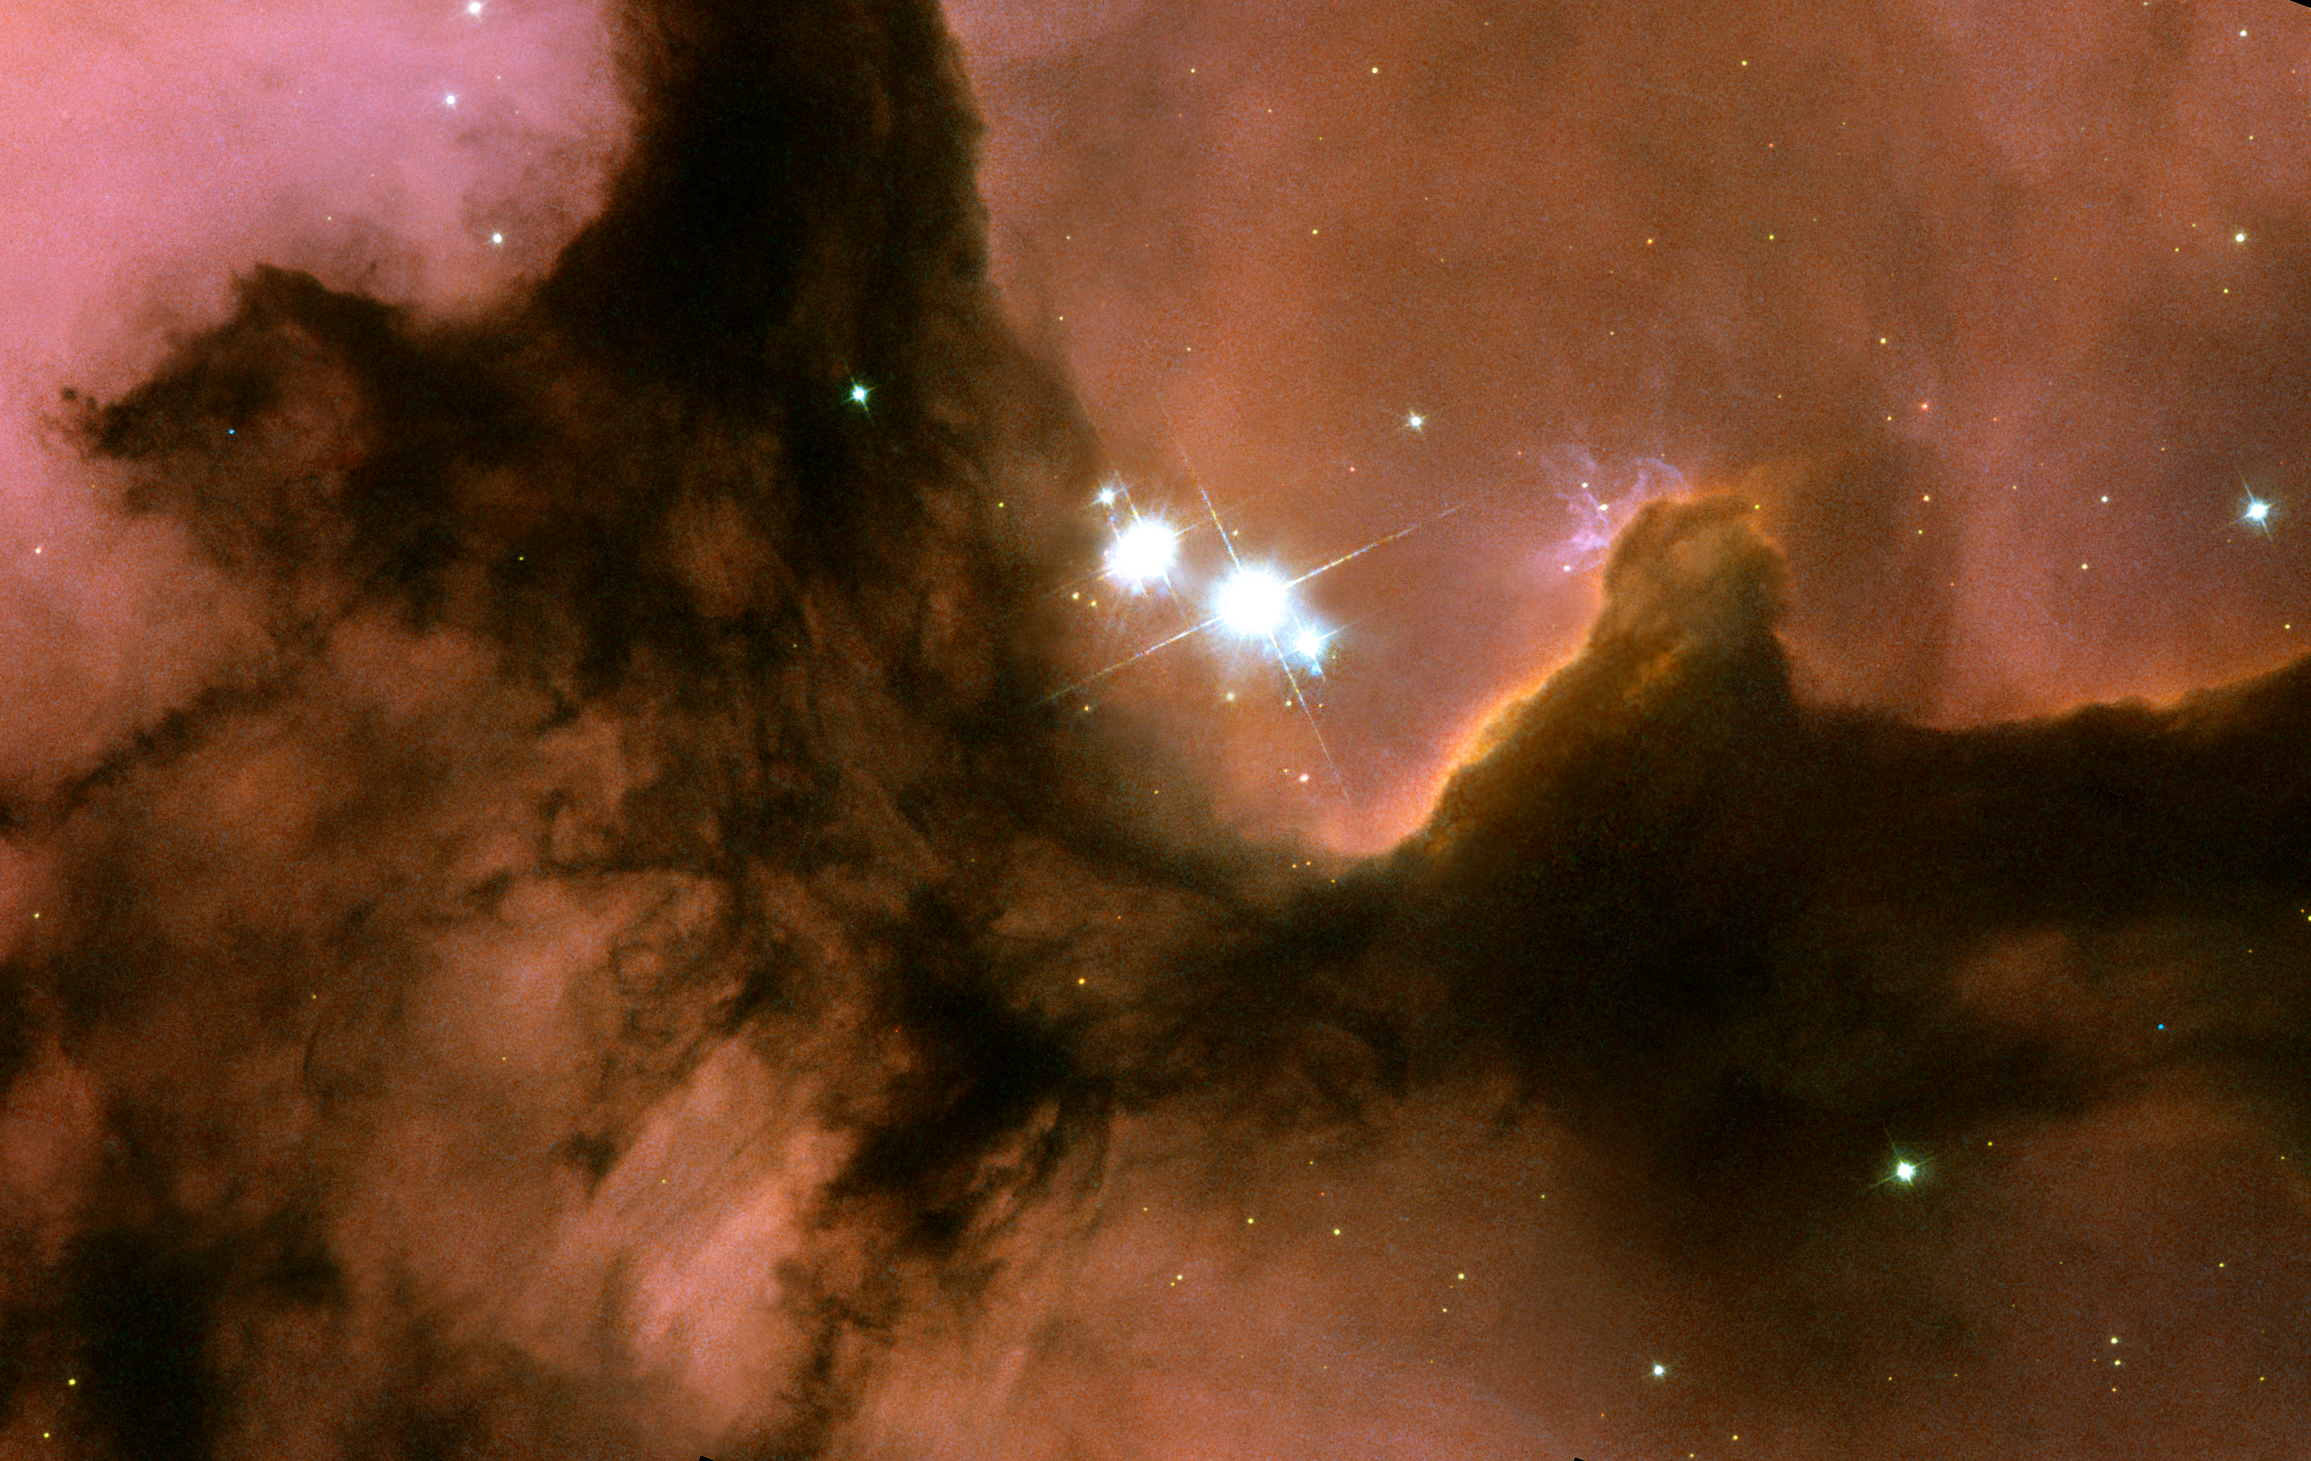

The heart of the Trifid Nebula

The Trifid Nebula, cataloged by astronomers as Messier 20 or NGC 6514, is a well-known region of star formation lying within our own Milky Way Galaxy. It is called the Trifid because the nebula is overlain by three bands of obscuring interstellar dust, giving it a trisected appearance as seen in small telescopes. The Trifid lies about 9,000 light-years (2,700 parsecs) from Earth, in the direction of the constellation Sagittarius.

Credit: NASA, ESA, and The Hubble Heritage Team (AURA/STScI)